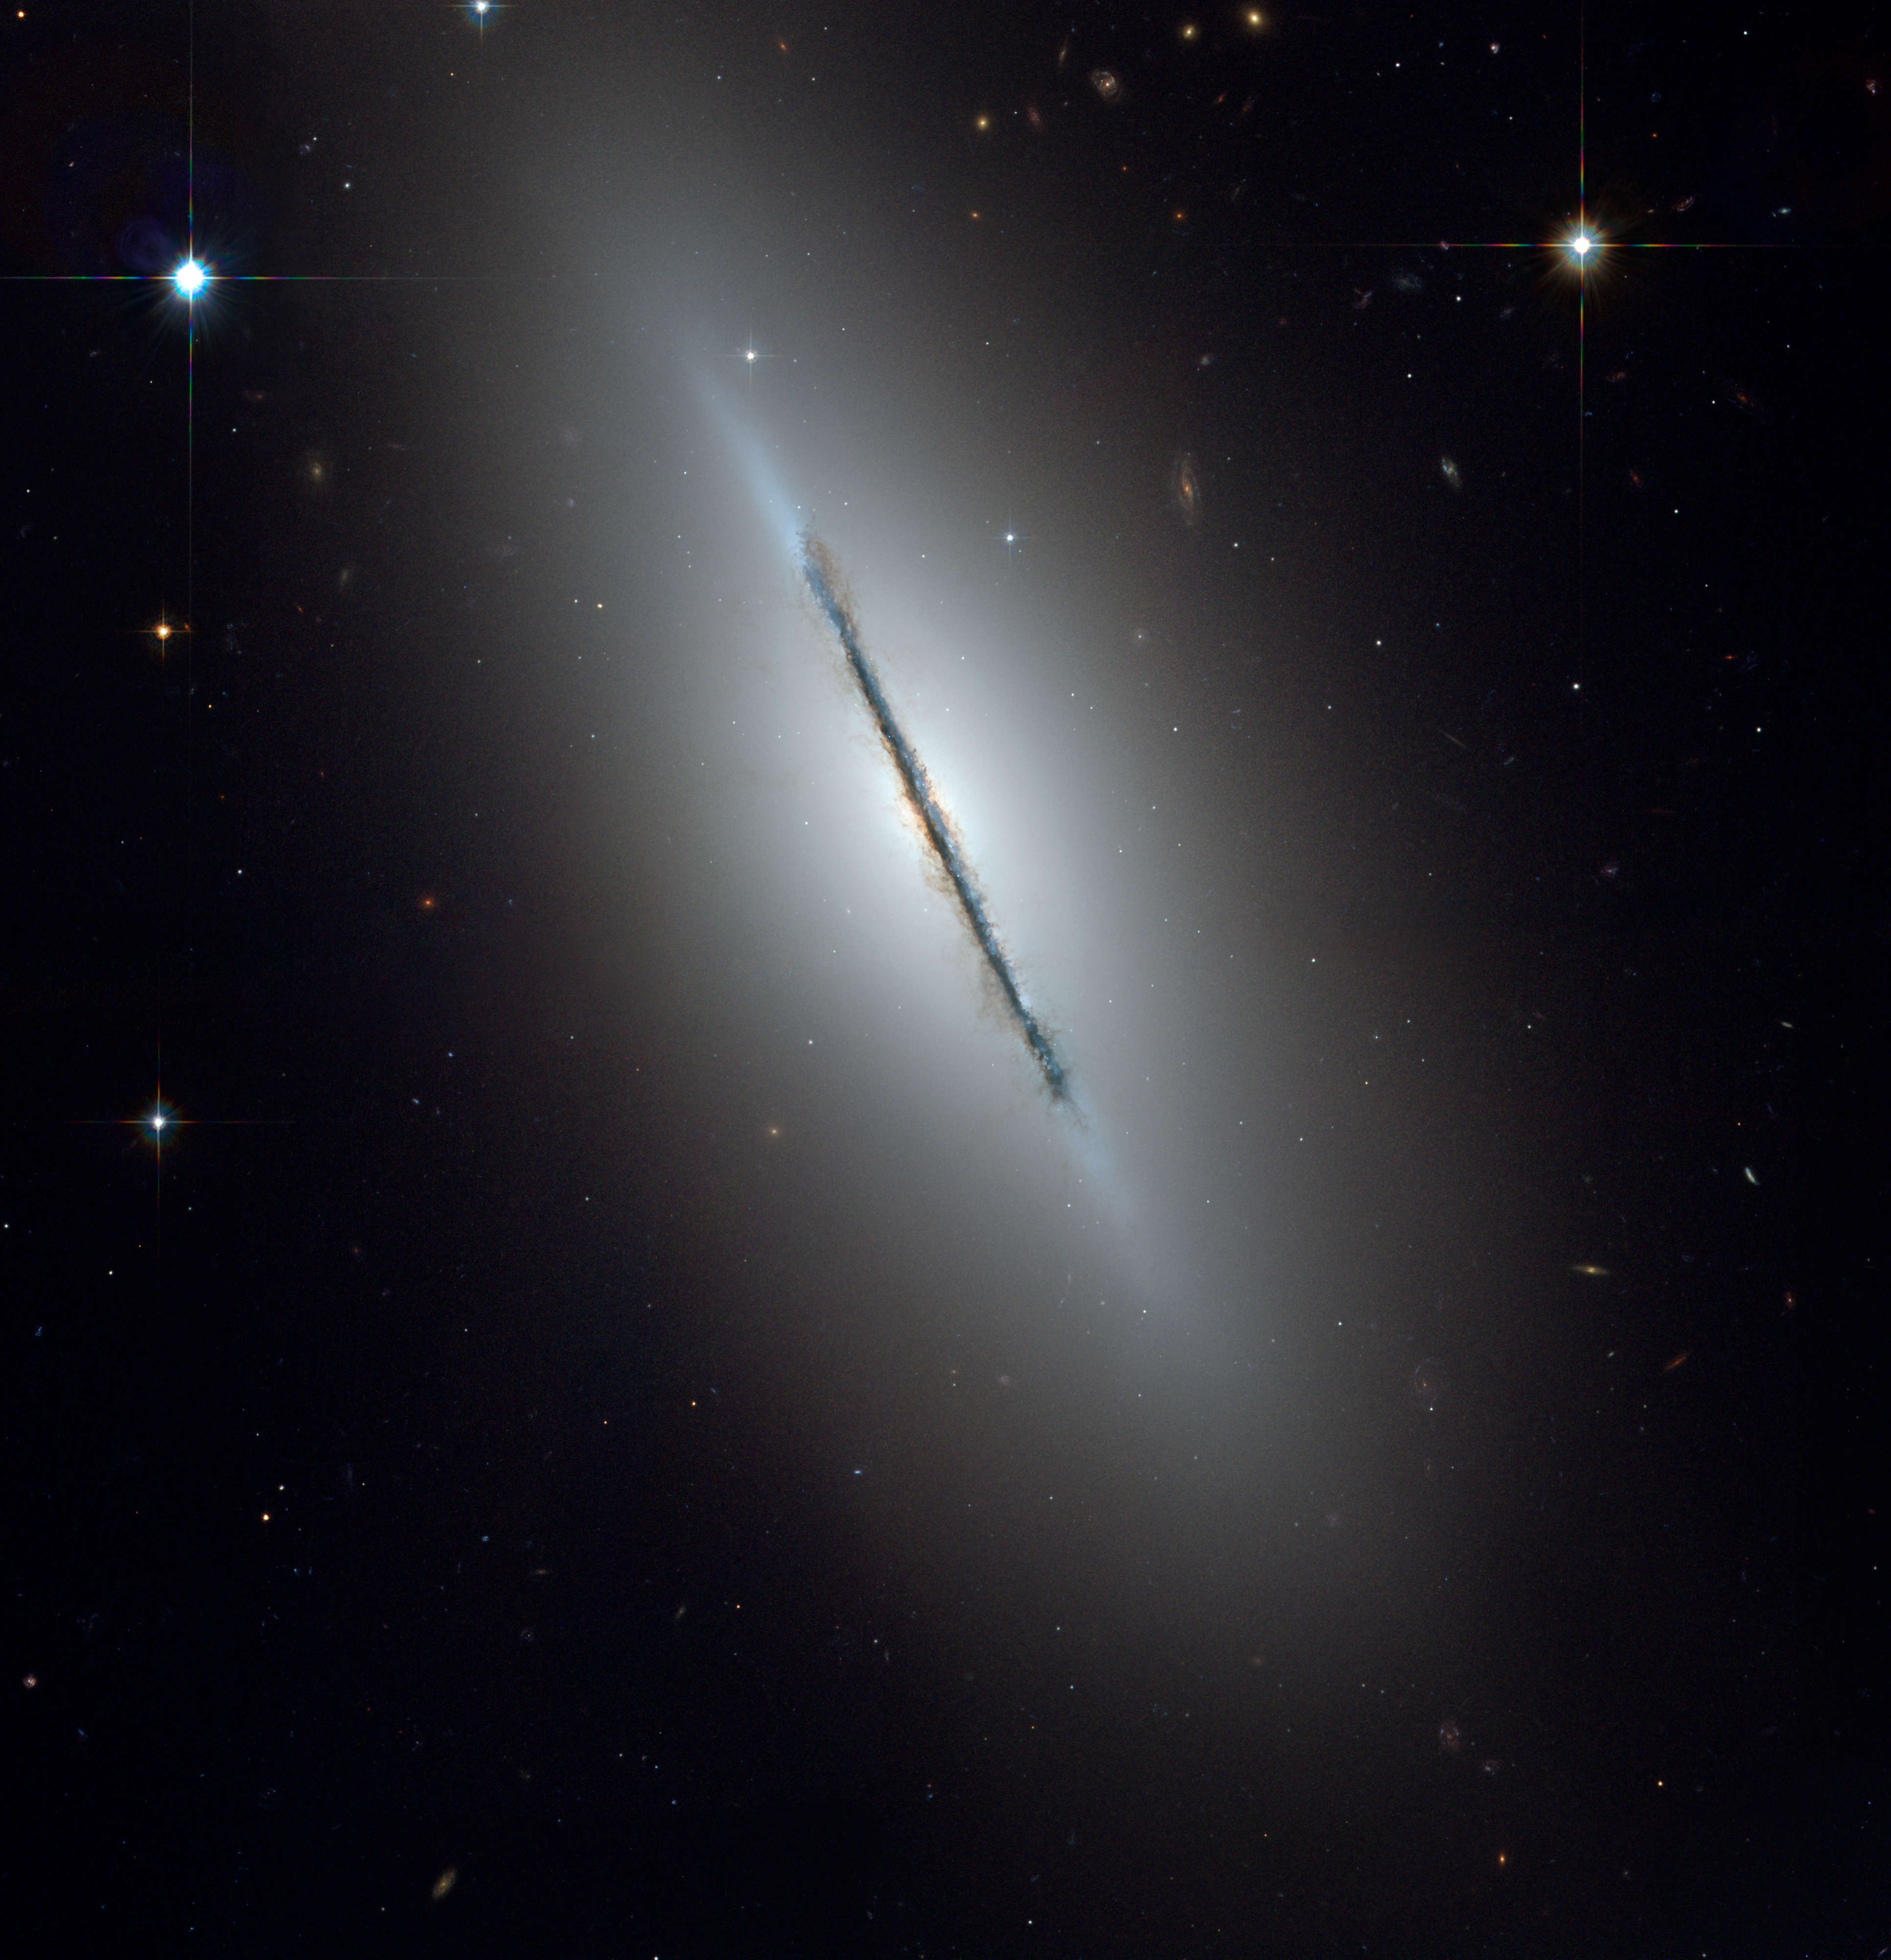

Full ACS image of NGC 5866

NGC 5866 is an edge-on galaxy that is tilted to our line-of-sight. It is classified as an S0 lenticular, due to its flat stellar disk and large ellipsoidal bulge. NGC 5866 lies in the Northern constellation Draco, at a distance of 44 million light-years (13.5 Megaparsecs). It has a diameter of roughly 60,000 light-years (18,400 parsecs). This Hubble image of NGC 5866 is a combination of blue, green and red observations taken with the Hubble Telescope's Advanced Camera for Surveys in November 2005.

Credit: NASA, ESA, and The Hubble Heritage Team (STScI/AURA)